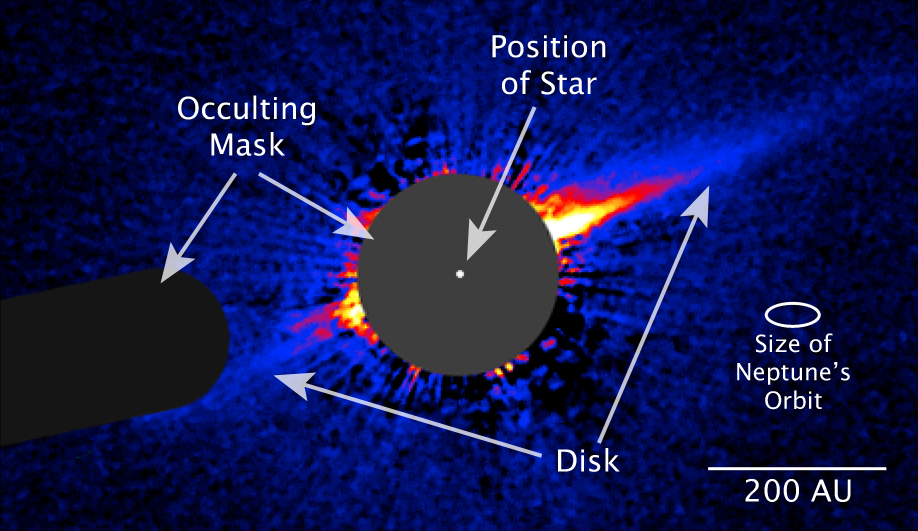

ESO 325-G004: Detailing the Big Picture

This image taken by NASA/ESA Hubble Space Telescope shows a lopsided debris disk around the young star HD 15115.

Credit: NASA, ESA, and P. Kalas (University of California, Berkeley)